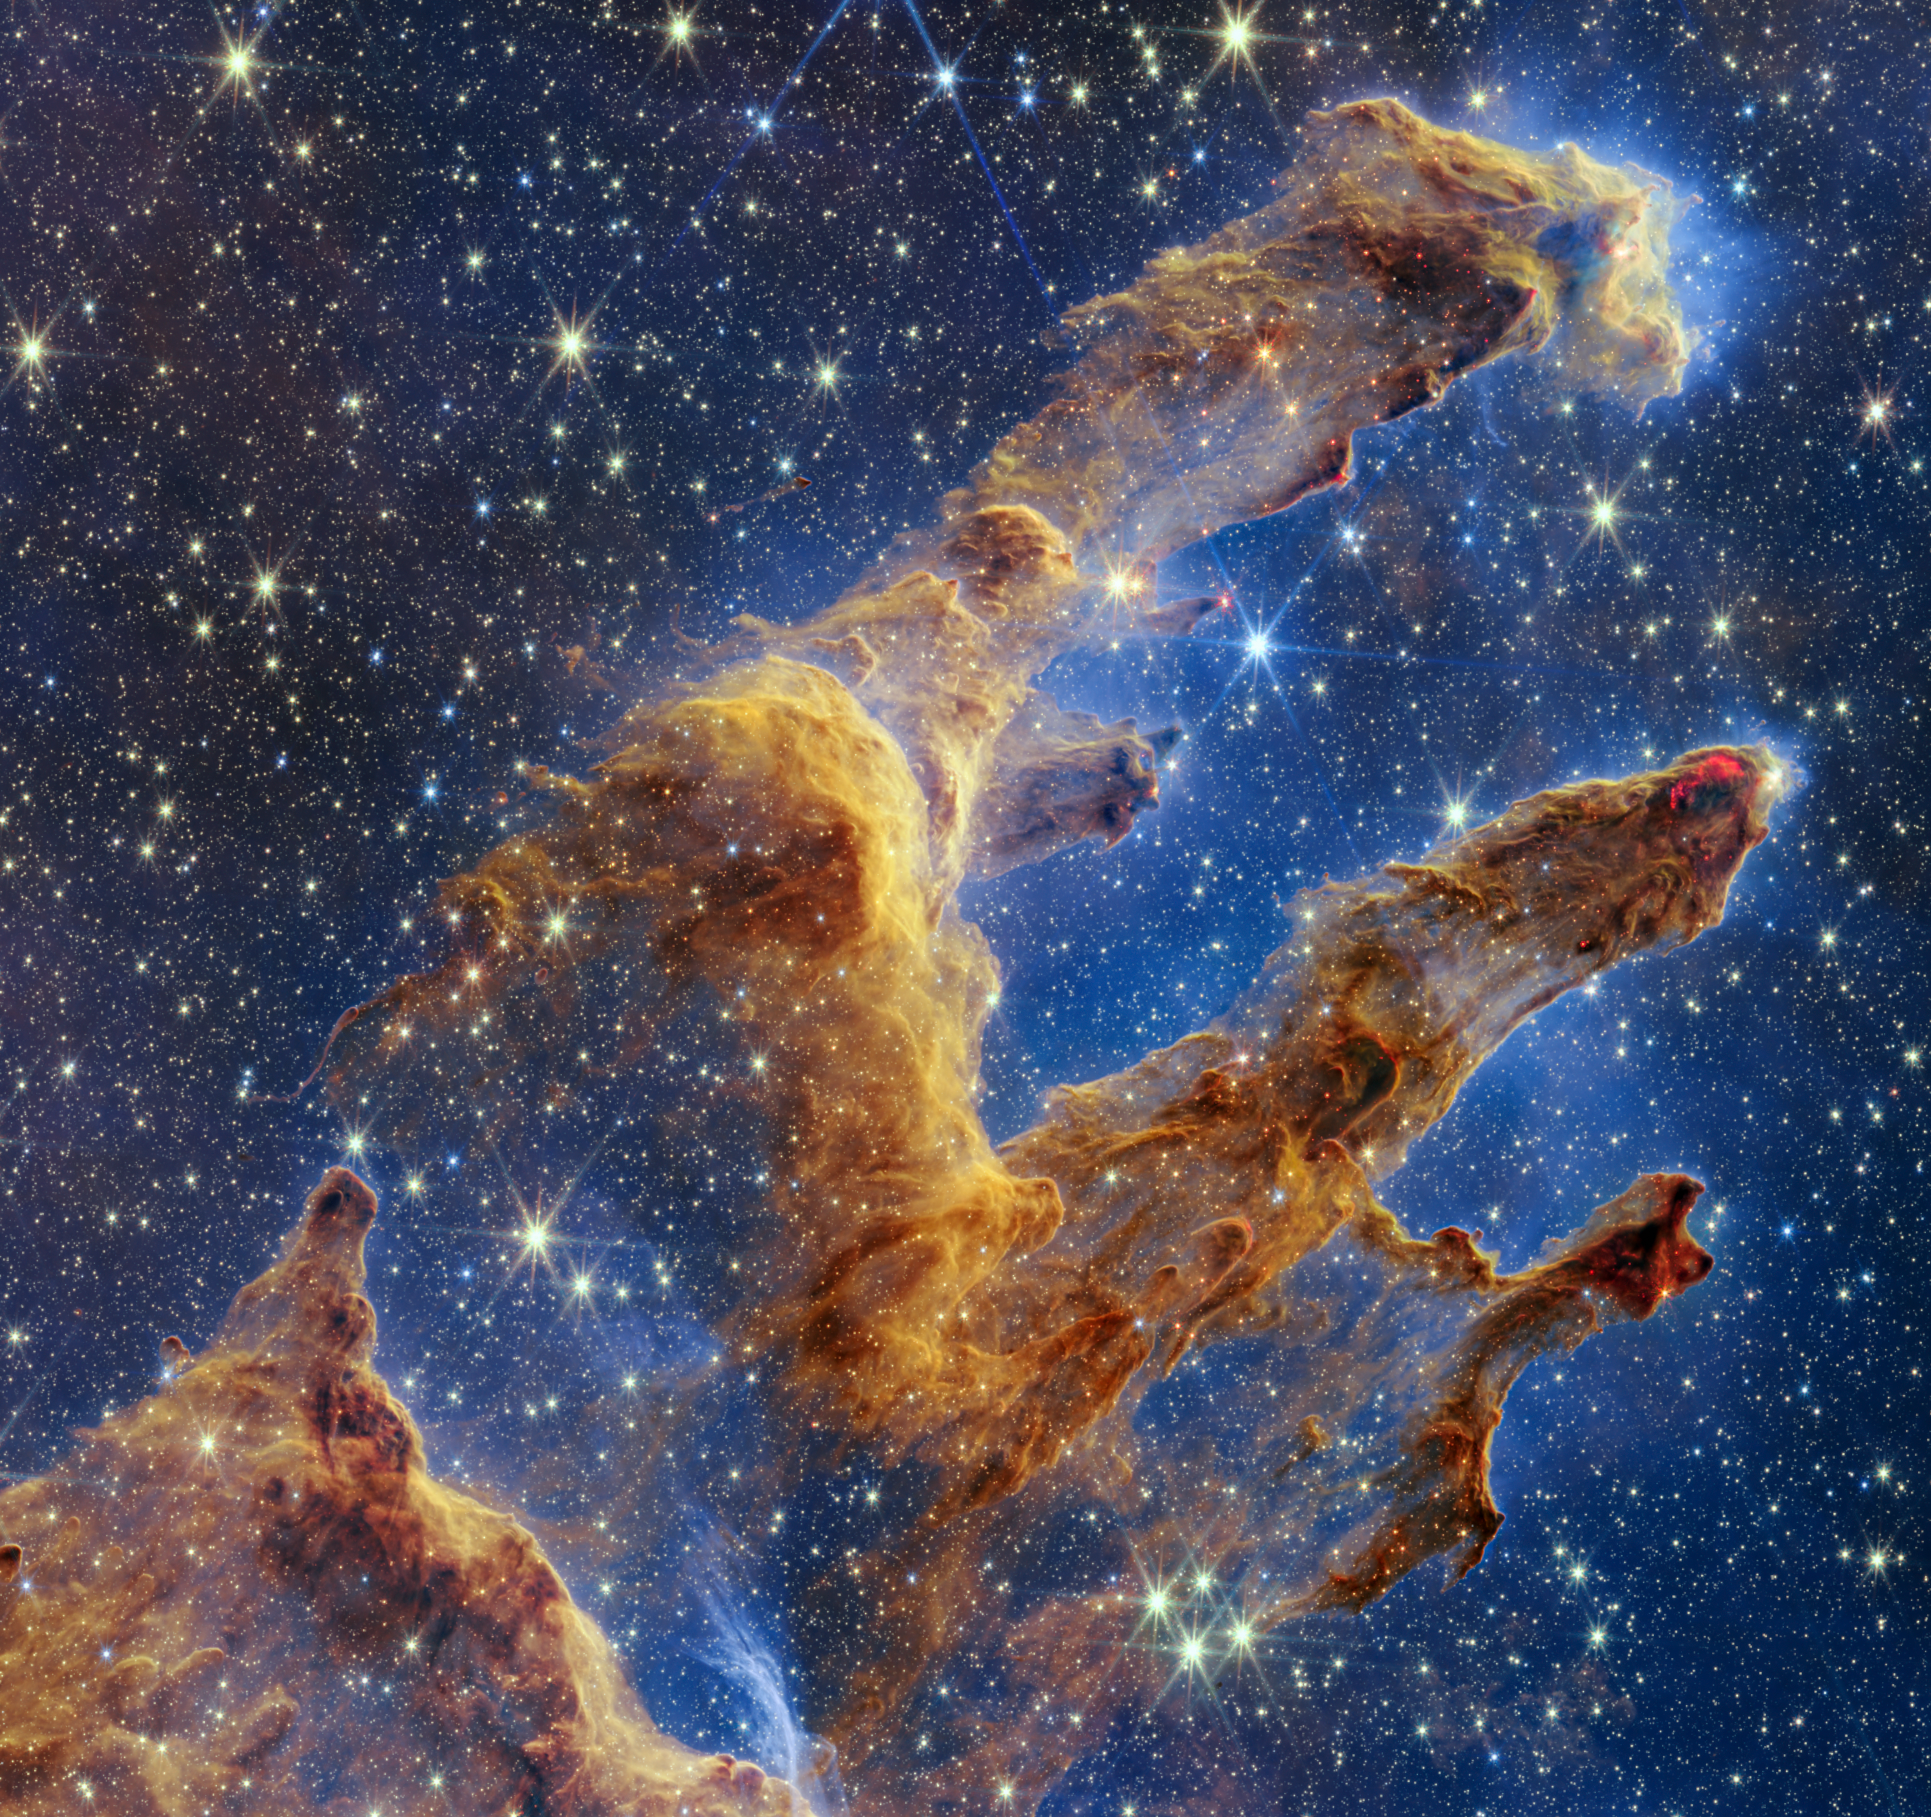

Webb’s Instruments Showcase the Pillars of Creation (NIRCam)

The Pillars of Creation are set off in a kaleidoscope of colour in the NASA/ESA/CSA James Webb Space Telescope’s near-infrared-light view. The pillars look like arches and spires rising out of a desert landscape, but are filled with semi-transparent gas and dust, and ever changing. This is a region where young stars are forming – or have barely burst from their dusty cocoons as they continue to form.

Protostars are the scene-stealers in this Near-Infrared Camera (NIRCam) image. These are the bright red orbs that sometimes appear with eight diffraction spikes. When knots with sufficient mass form within the pillars, they begin to collapse under their own gravity, slowly heat up, and eventually begin shining brightly.

Along the edges of the pillars are wavy lines that look like lava. These are ejections from stars that are still forming. Young stars periodically shoot out jets that can interact within clouds of material, like these thick pillars of gas and dust. This sometimes also results in bow shocks, which can form wavy patterns like a boat does as it moves through water. These young stars are estimated to be only a few hundred thousand years old, and will continue to form for millions of years.

Although it may appear that near-infrared light has allowed Webb to “pierce through” the background to reveal great cosmic distances beyond the pillars, the interstellar medium stands in the way, like a drawn curtain.

This is also the reason why there are no distant galaxies in this view. This translucent layer of gas blocks our view of the deeper universe. Plus, dust is lit up by the collective light from the packed “party” of stars that have burst free from the pillars. It’s like standing in a well-lit room looking out a window – the interior light reflects on the pane, obscuring the scene outside and, in turn, illuminating the activity at the party inside.

Webb’s new view of the Pillars of Creation will help researchers revamp models of star formation. By identifying far more precise star populations, along with the quantities of gas and dust in the region, they will begin to build a clearer understanding of how stars form and burst out of these clouds over millions of years.

The Pillars of Creation is a small region within the vast Eagle Nebula, which lies 6,500 light-years away.

Webb’s NIRCam was built by a team at the University of Arizona and Lockheed Martin’s Advanced Technology Center.

Credit: NASA, ESA, CSA, STScI; J. DePasquale, A. Koekemoer, A. Pagan (STScI).